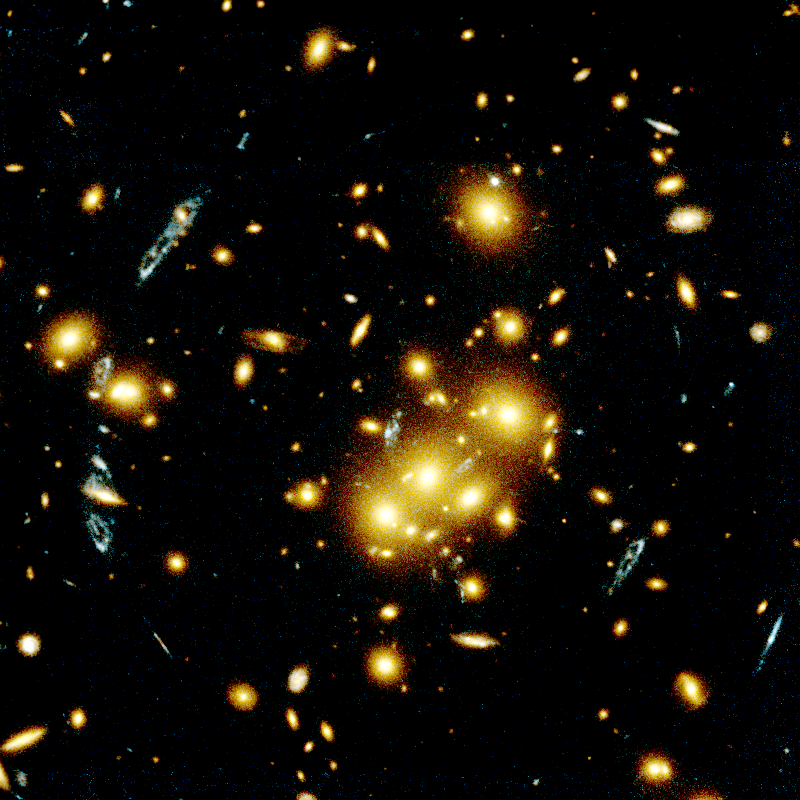

Galaxy Cluster 0024+1654 as a Gravitational Lens

This Hubble Space Telescope image shows several blue, loop-shaped objects that actually are multiple images of the same galaxy.

They have been duplicated by the gravitational lens of the cluster of yellow, elliptical and spiral galaxies - called 0024+1654 - near the photograph's center.

Credit: W.N. Colley and E. Turner (Princeton University), J.A. Tyson (Bell Labs, Lucent Technologies) and NASA/ESA